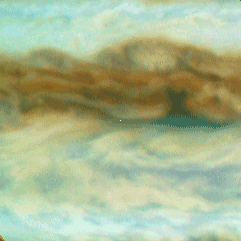

Galileo Probe Entry Site on Jupiter

This is one out of four enlarged Hubble images of Jupiter's equatorial region and it shows clouds sweeping across the predicted Galileo probe entry site, which is at the exact center of each frame (a small white dot has been inserted at the centered at the predicted entry site).

Credit: Reta Beebe (New Mexico State University), and NASA/ESA